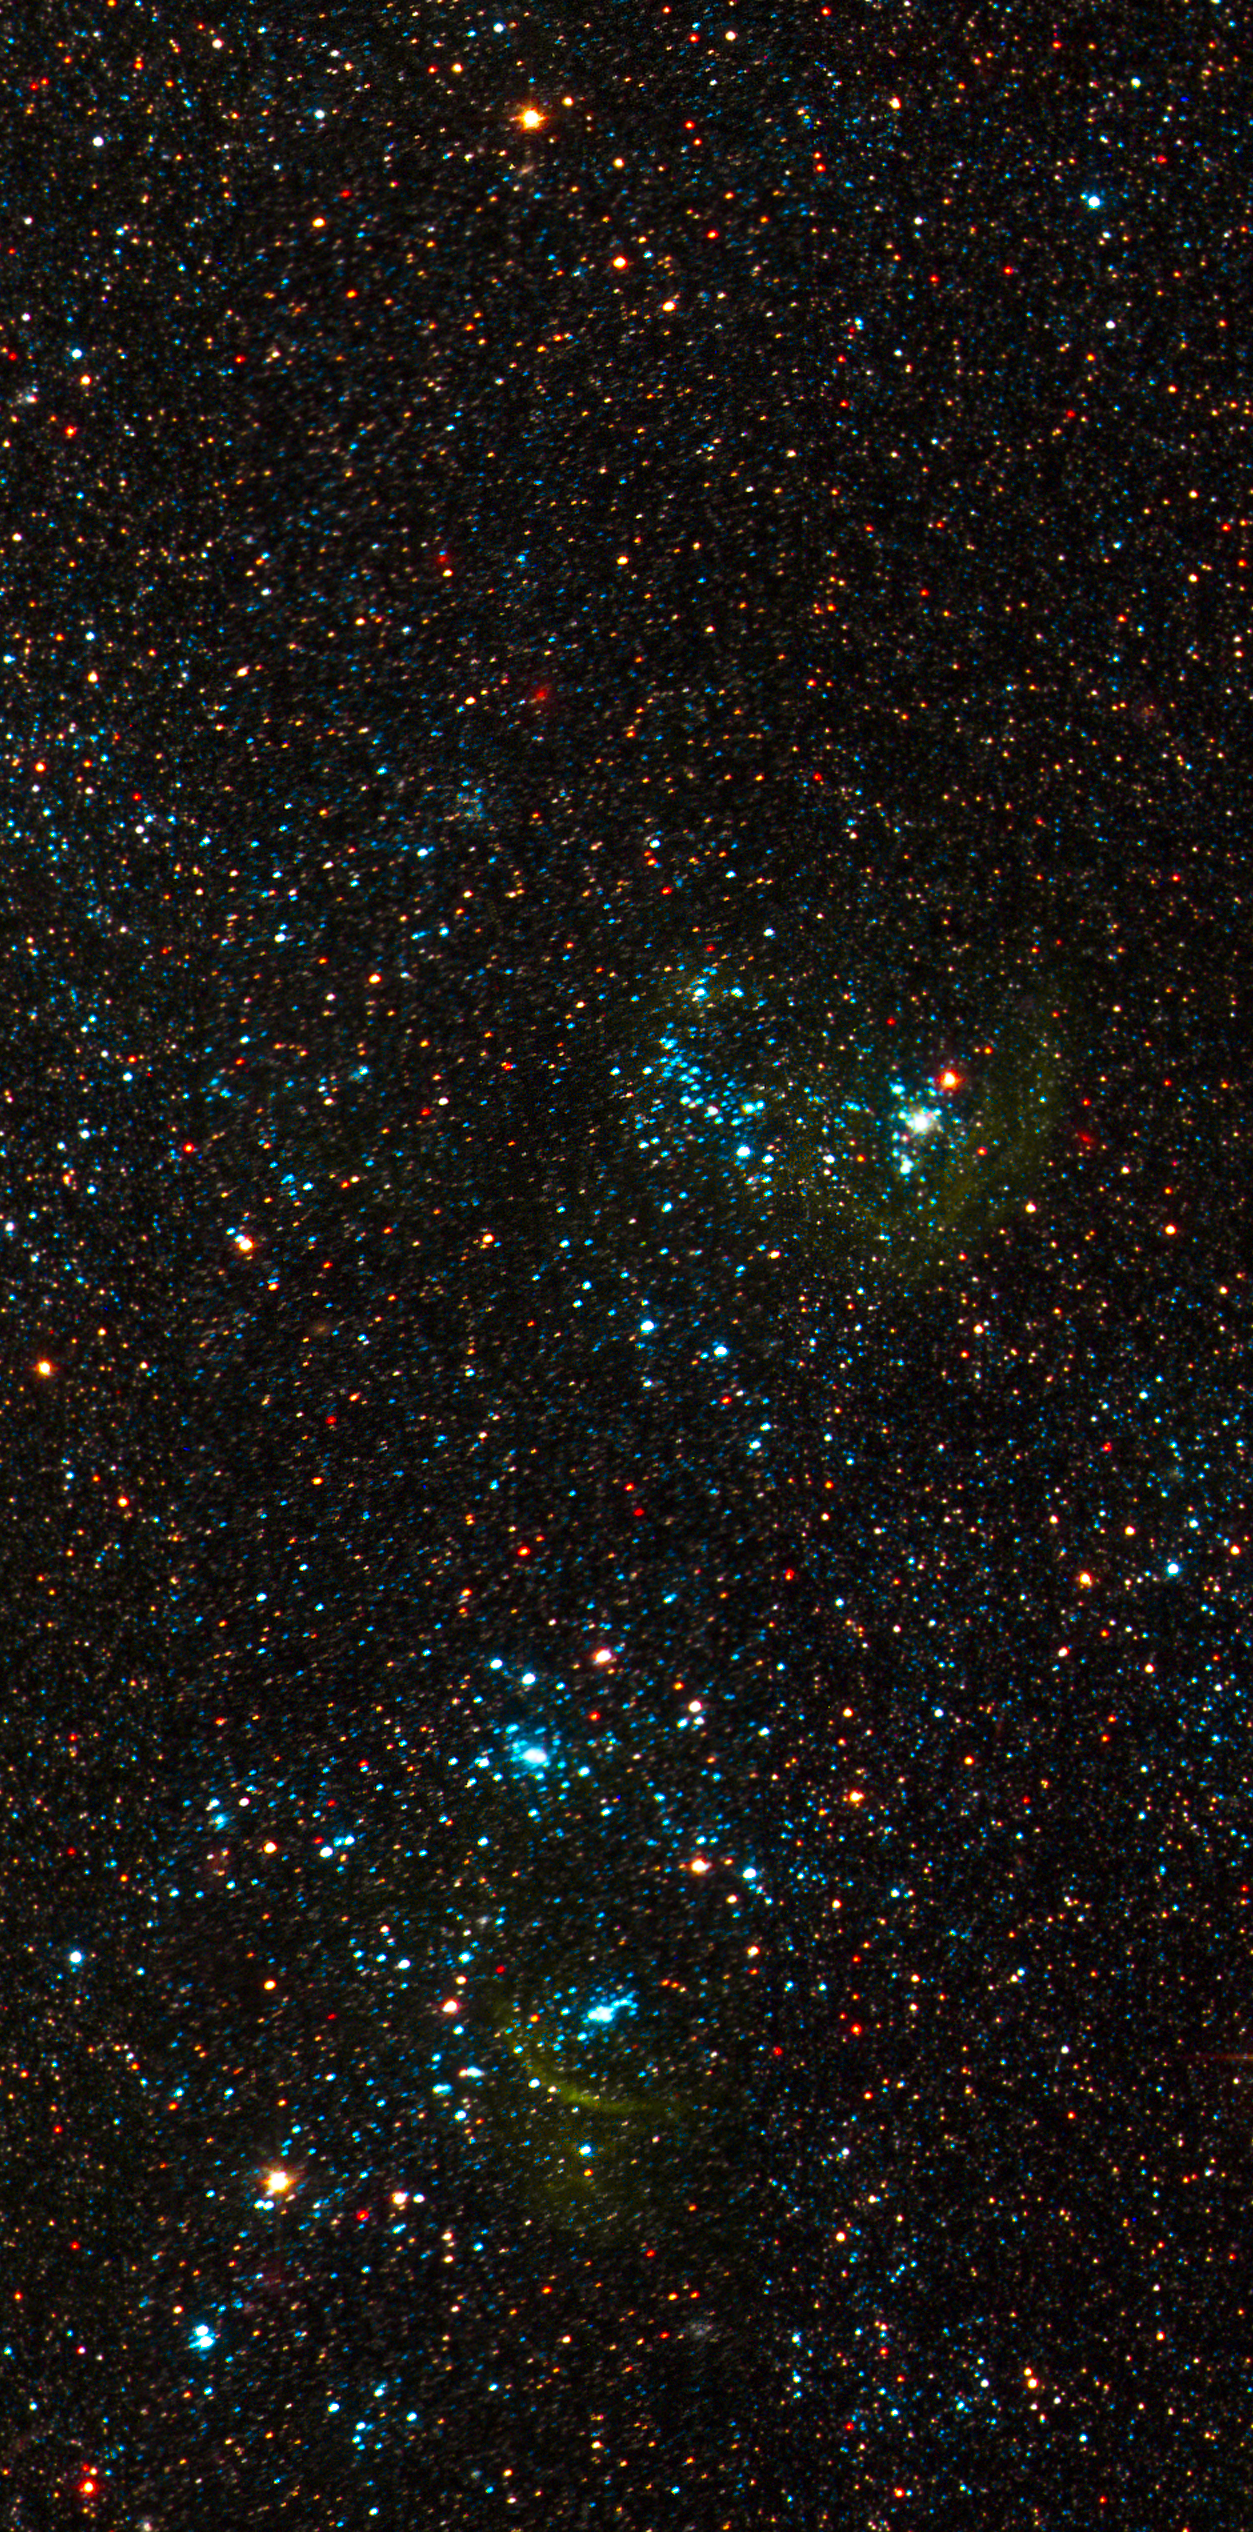

NGC 300 Detail 3

Hubble's Advanced Camera for Surveys shows individual stars and clusters of stars in the spiral galaxy NGC 300, located approximately 7 million light-years away from Earth.

Credit: NASA, ESA, J. Dalcanton and B. Williams (University of Washington)